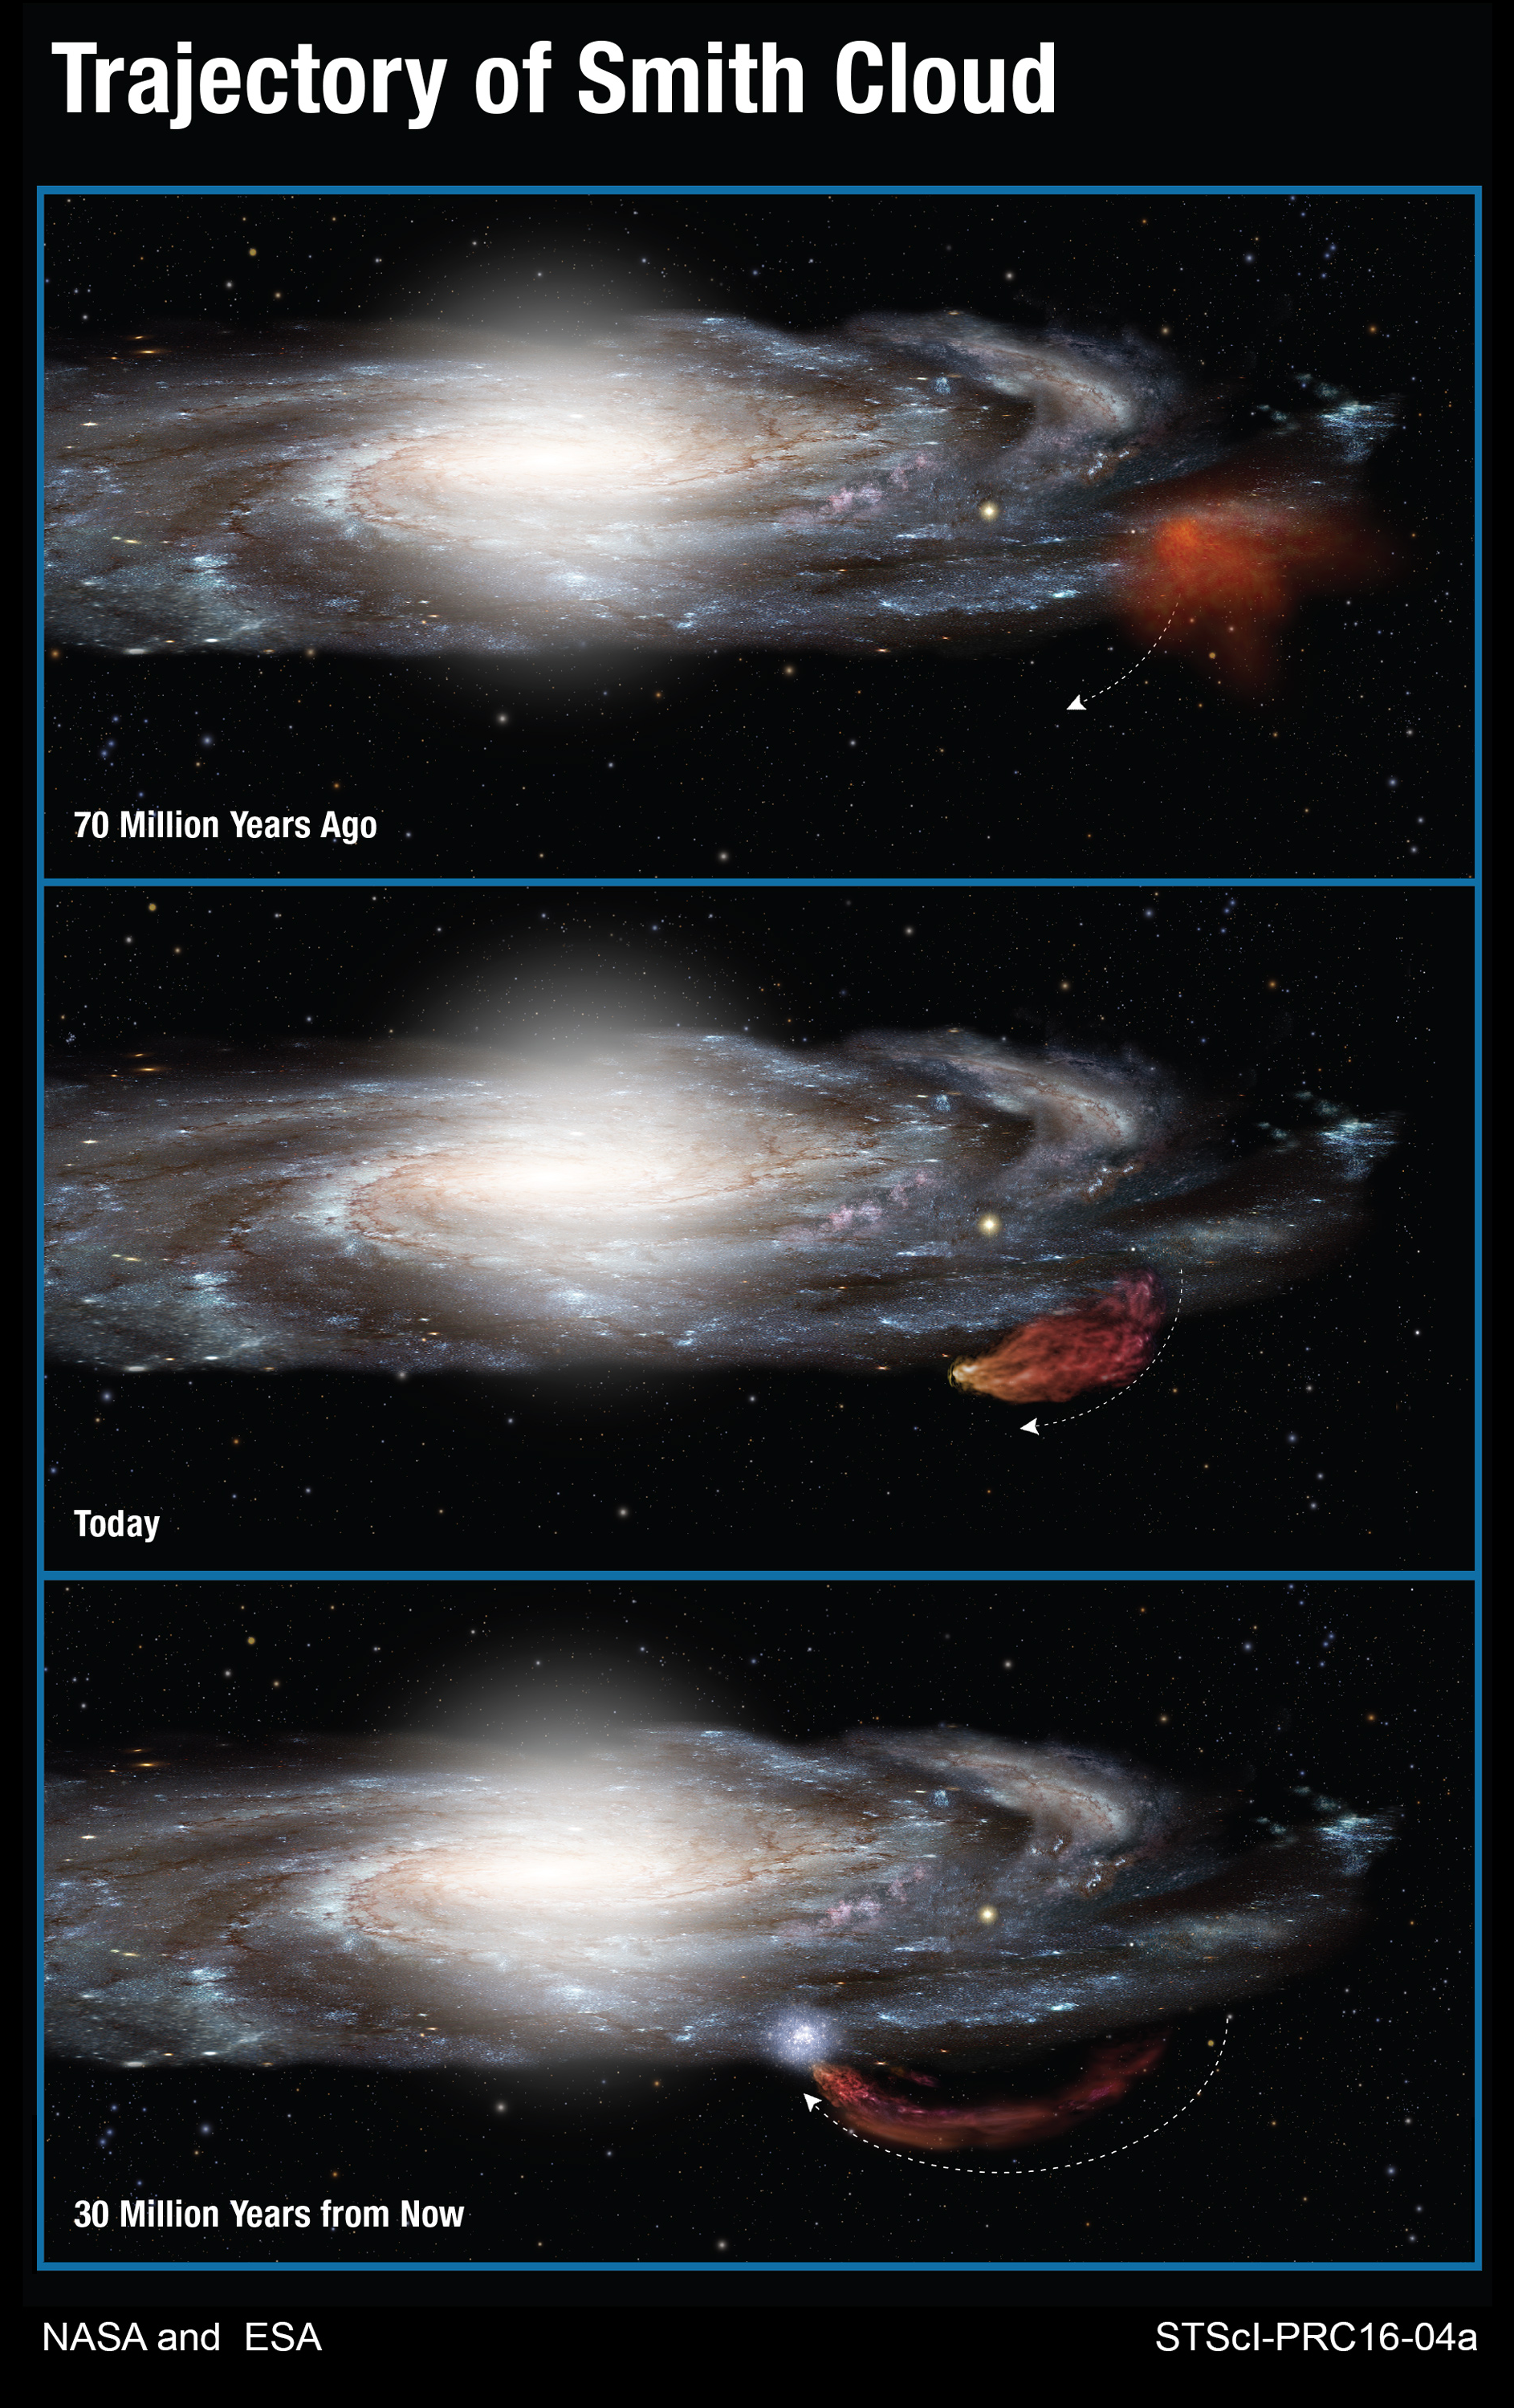

Trajectory of Smith Cloud

This diagram shows the 100-million-year-long trajectory of the Smith Cloud as it arcs out of the plane of our Milky Way galaxy and then returns like a boomerang. Measurements made with the NASA/ESA Hubble Space Telescope show that the cloud, because of its chemical composition, came out of a region near the edge of the galaxy's disc of stars 70 million years ago. The cloud is now stretched into the shape of a comet by gravity and gas pressure. Following a ballistic path, the cloud will fall back into the disc and trigger new star formation 30 million years from now.

Credit: NASA, ESA, and A. Feild (STScI)